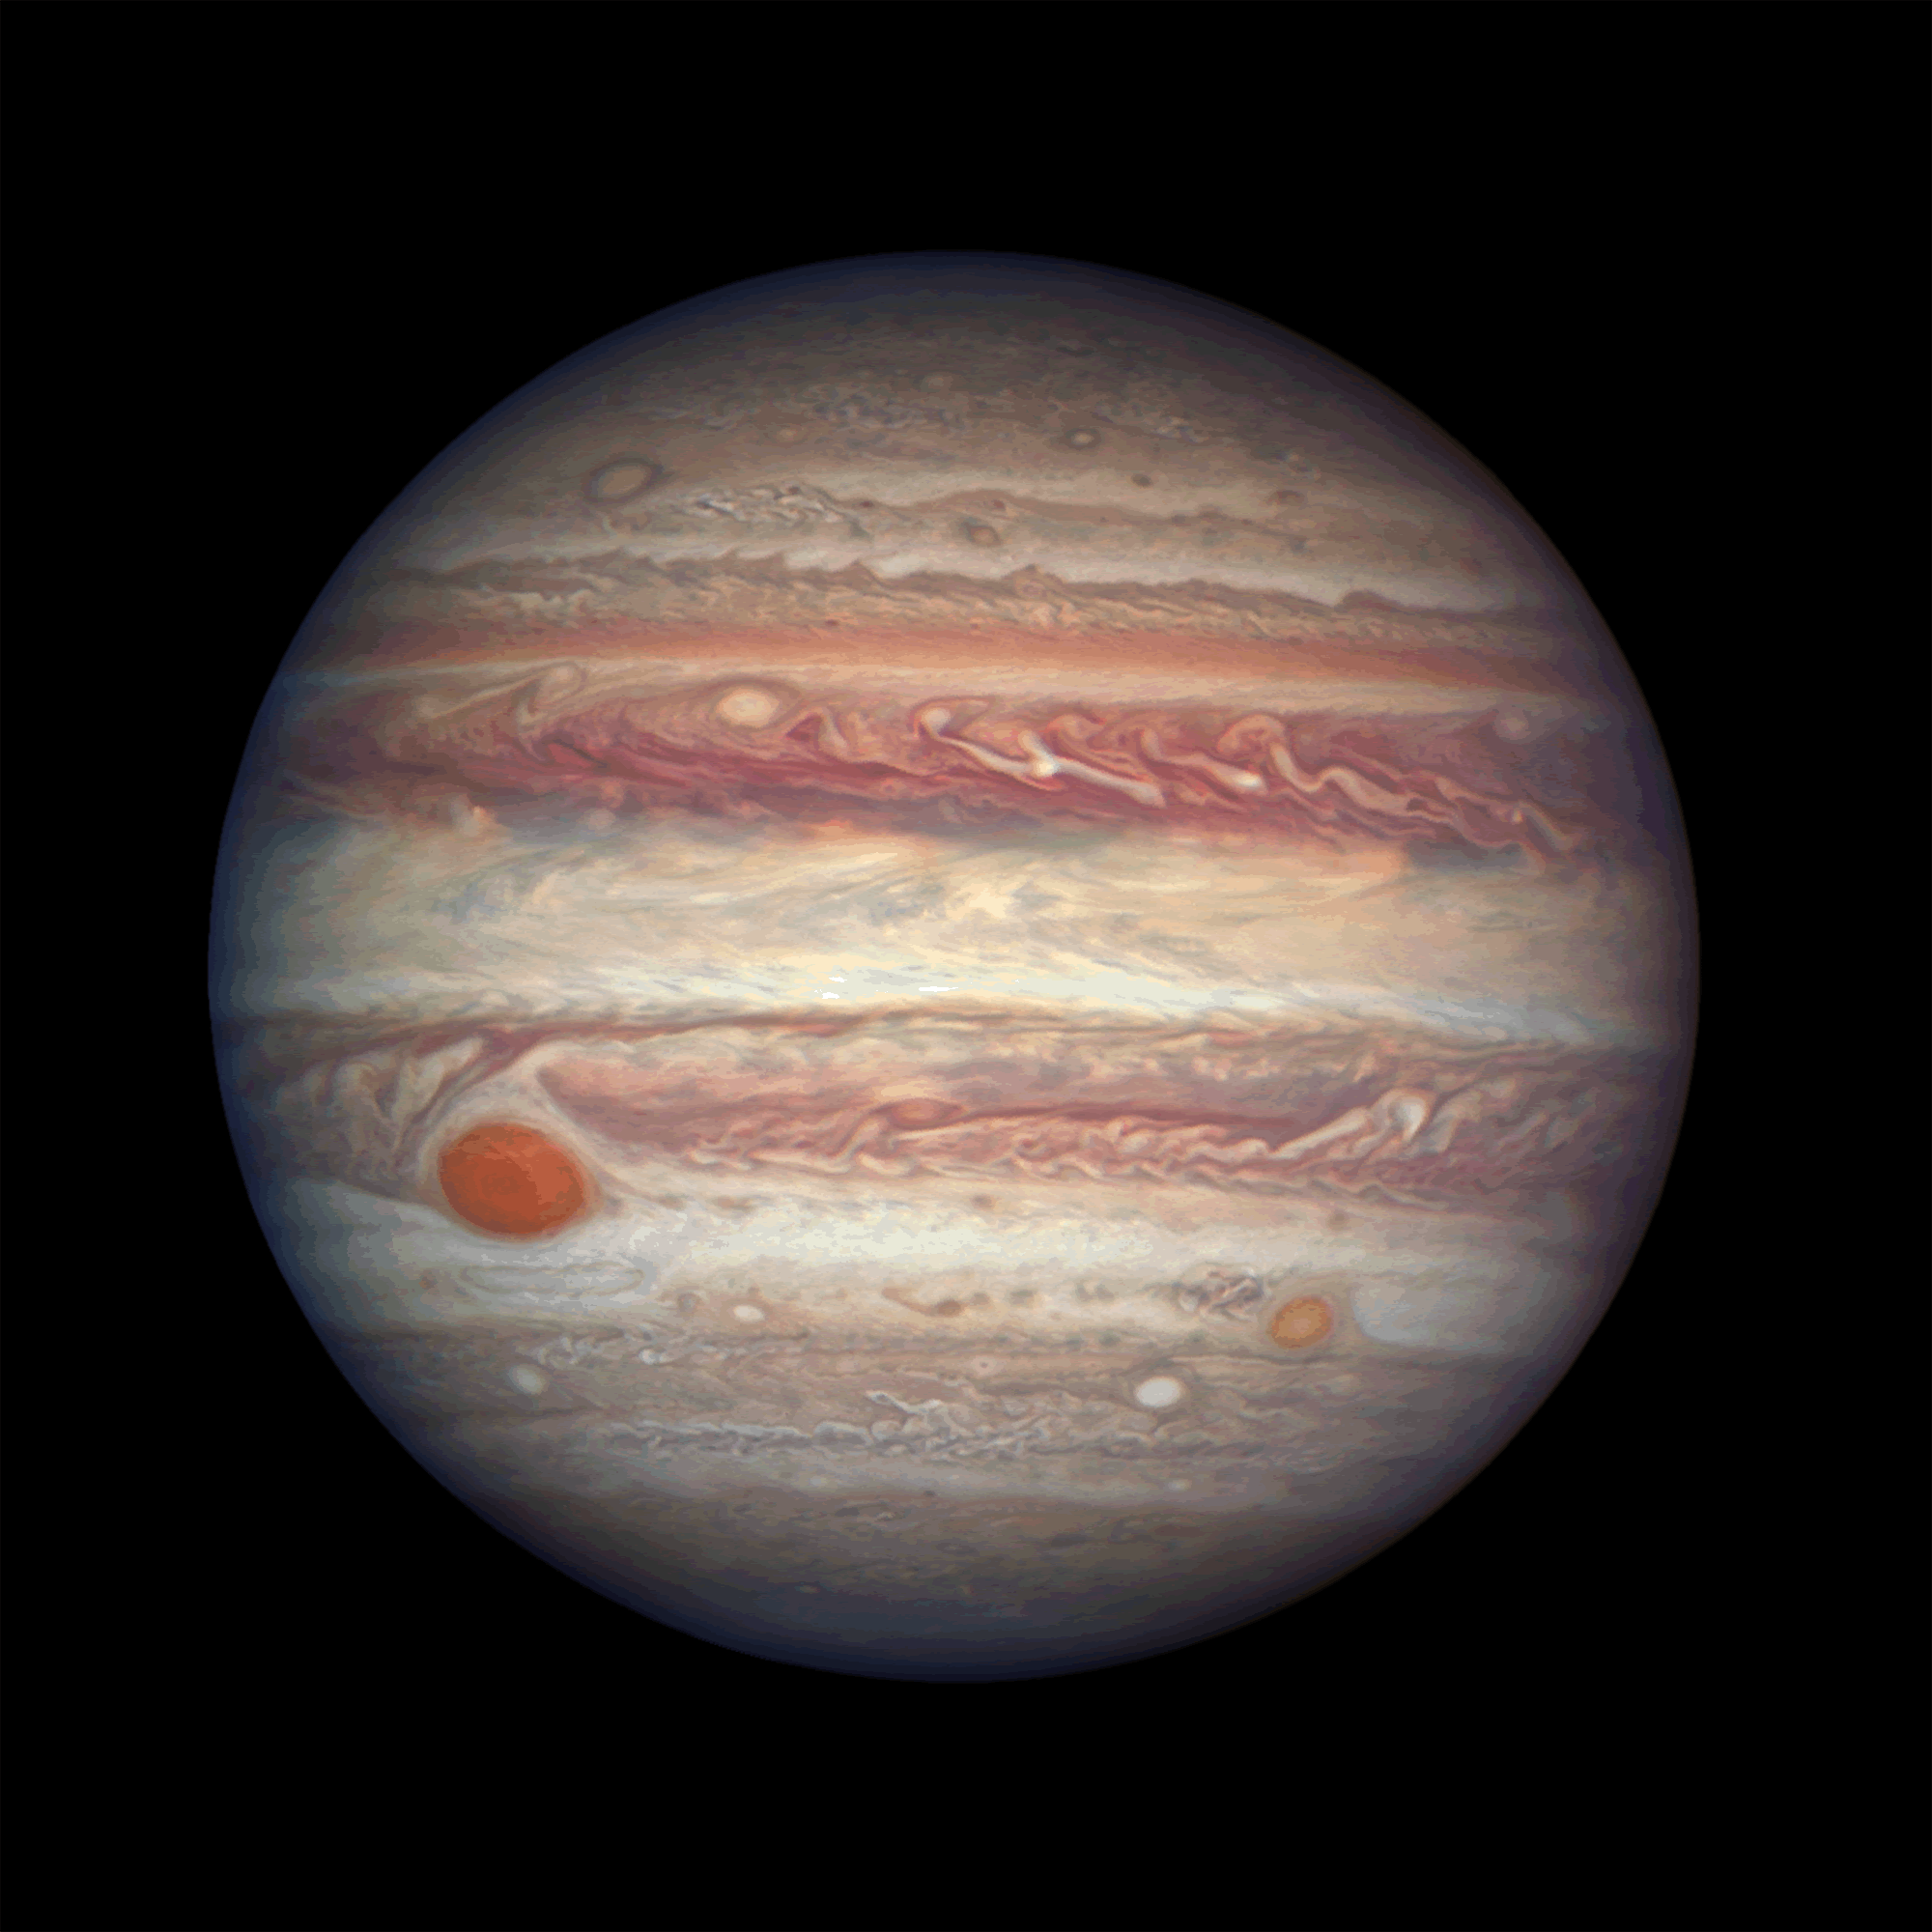

Jupiter's swirling colourful clouds

This image of Jupiter was taken when the planet was at a distance of 670 million kilometres from Earth. The NASA/ESA Hubble Space Telescope reveals the intricate, detailed beauty of Jupiter’s clouds as arranged into bands of different latitudes. These bands are produced by air flowing in different directions at various latitudes. Lighter coloured areas, called zones, are high-pressure where the atmosphere rises. Darker low-pressure regions where air falls are called belts. Constantly stormy weather occurs where these opposing east-to-west and west-to-east flows interact. The planet’s trademark, the Great Red Spot, is a long-lived storm roughly the diameter of Earth. Much smaller storms appear as white or brown-coloured ovals. Such storms can last as little as a few hours or stretch on for centuries.

Credit: NASA, ESA, and A. Simon (GSFC)